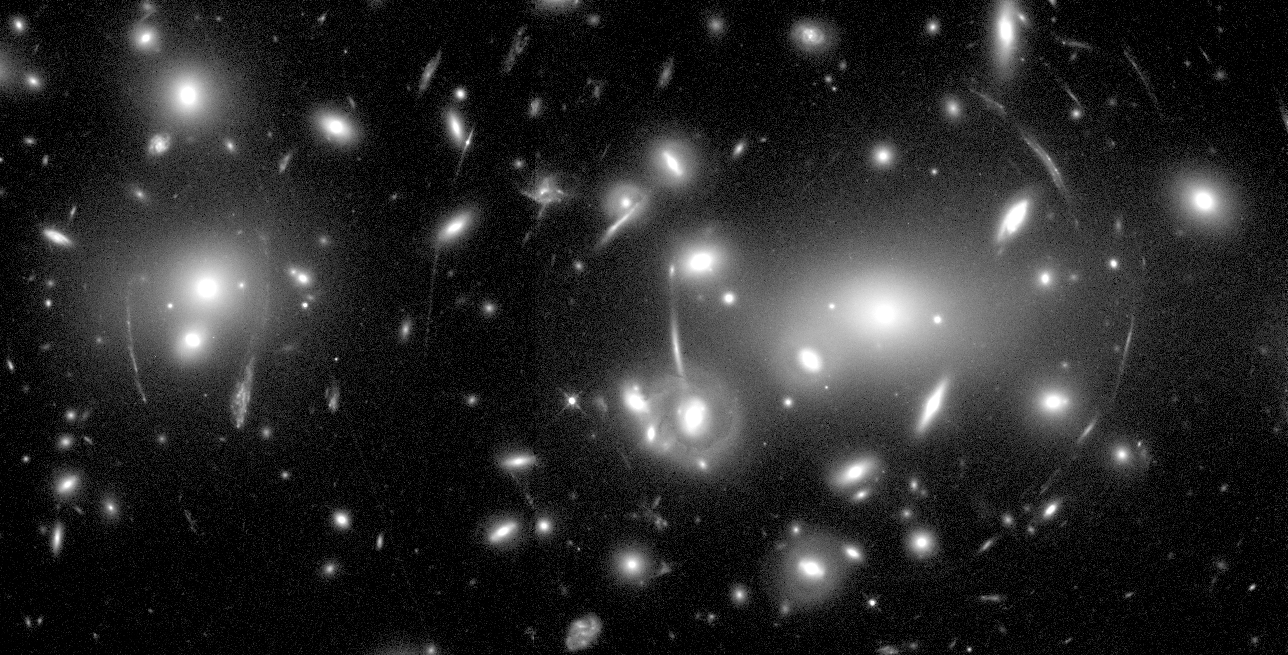

Galaxy Cluster Abell 2218

This Hubble Space Telescope image of the rich galaxy cluster, Abell 2218, is a spectacular example of Gravitational Lensing. The arc-like pattern spread across the picture like a spider web is an illusion caused by the gravitational field of the cluster.

Credit: W.Couch (University of New South Wales), R. Ellis (Cambridge University), and NASA/ESA